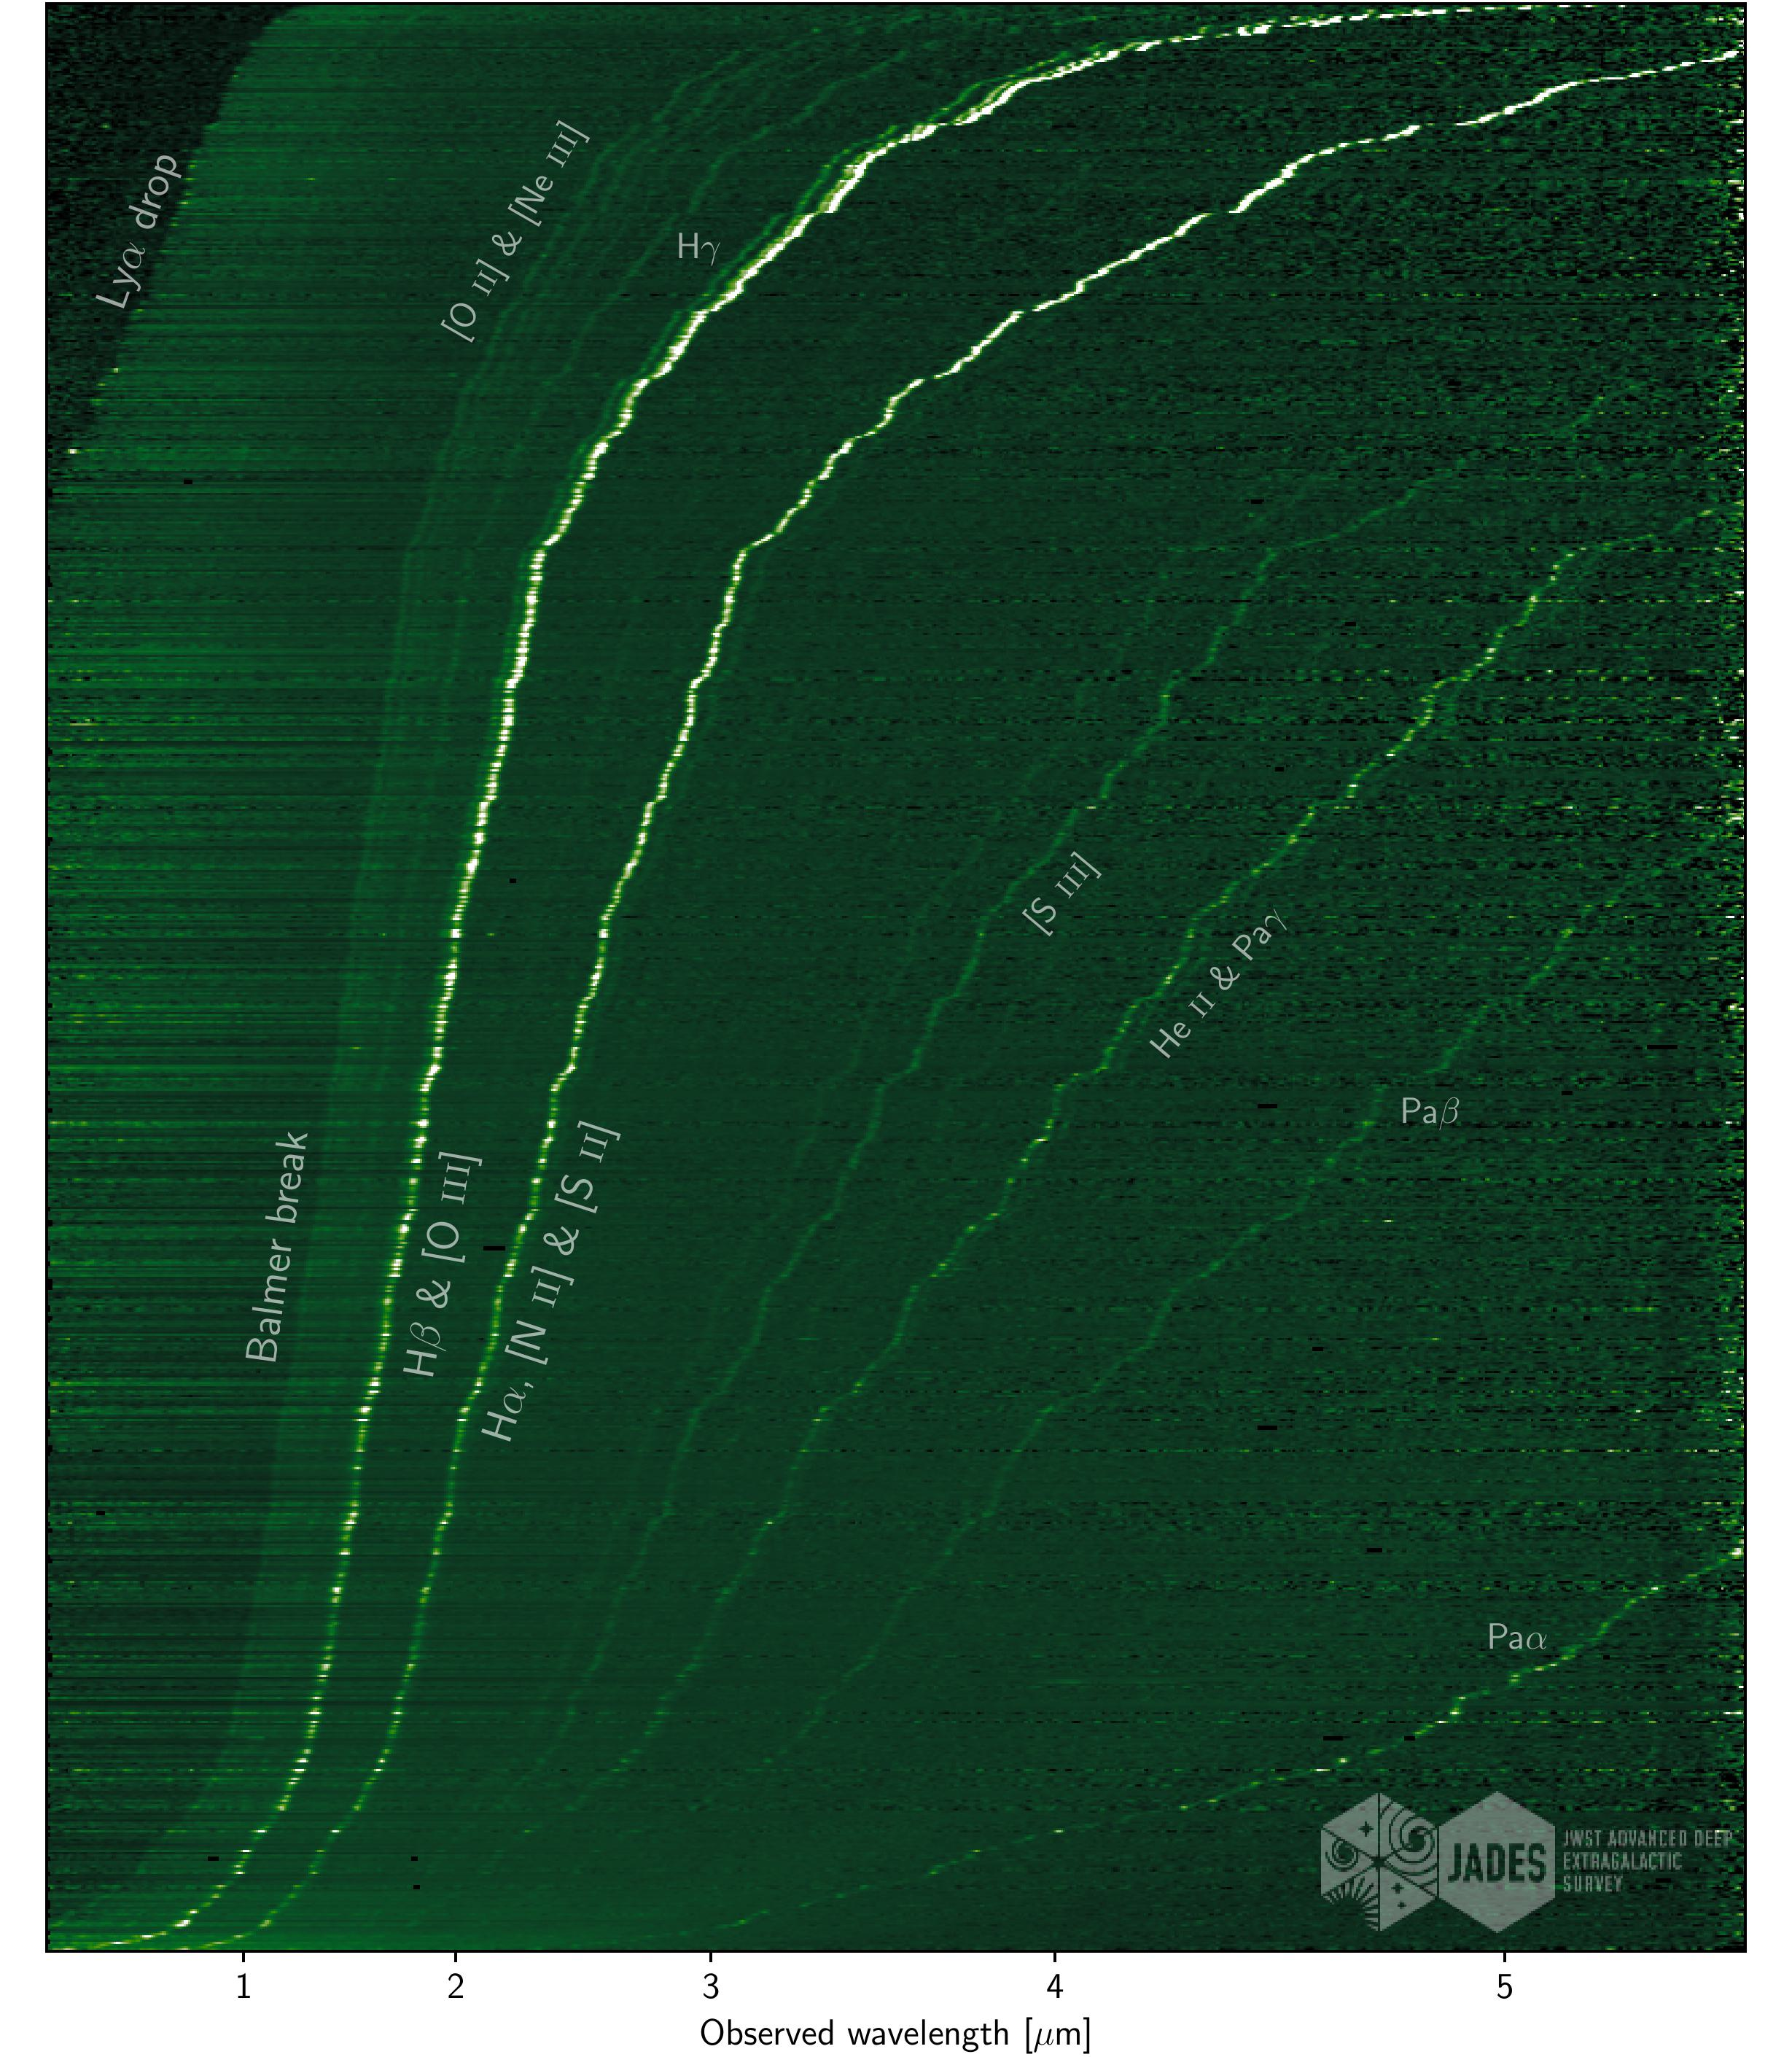

Emission-line spectra from the latest JADES Data Release 4

A selection of high-quality emission-line spectra from the latest JADES Data Release, sorted by redshift. Numerous emission line and continuum features are clearly visible, showcasing the richness of the dataset (from Curtis-Lake et al. 2025, in press).

Credit: Curtis-Lake et al.